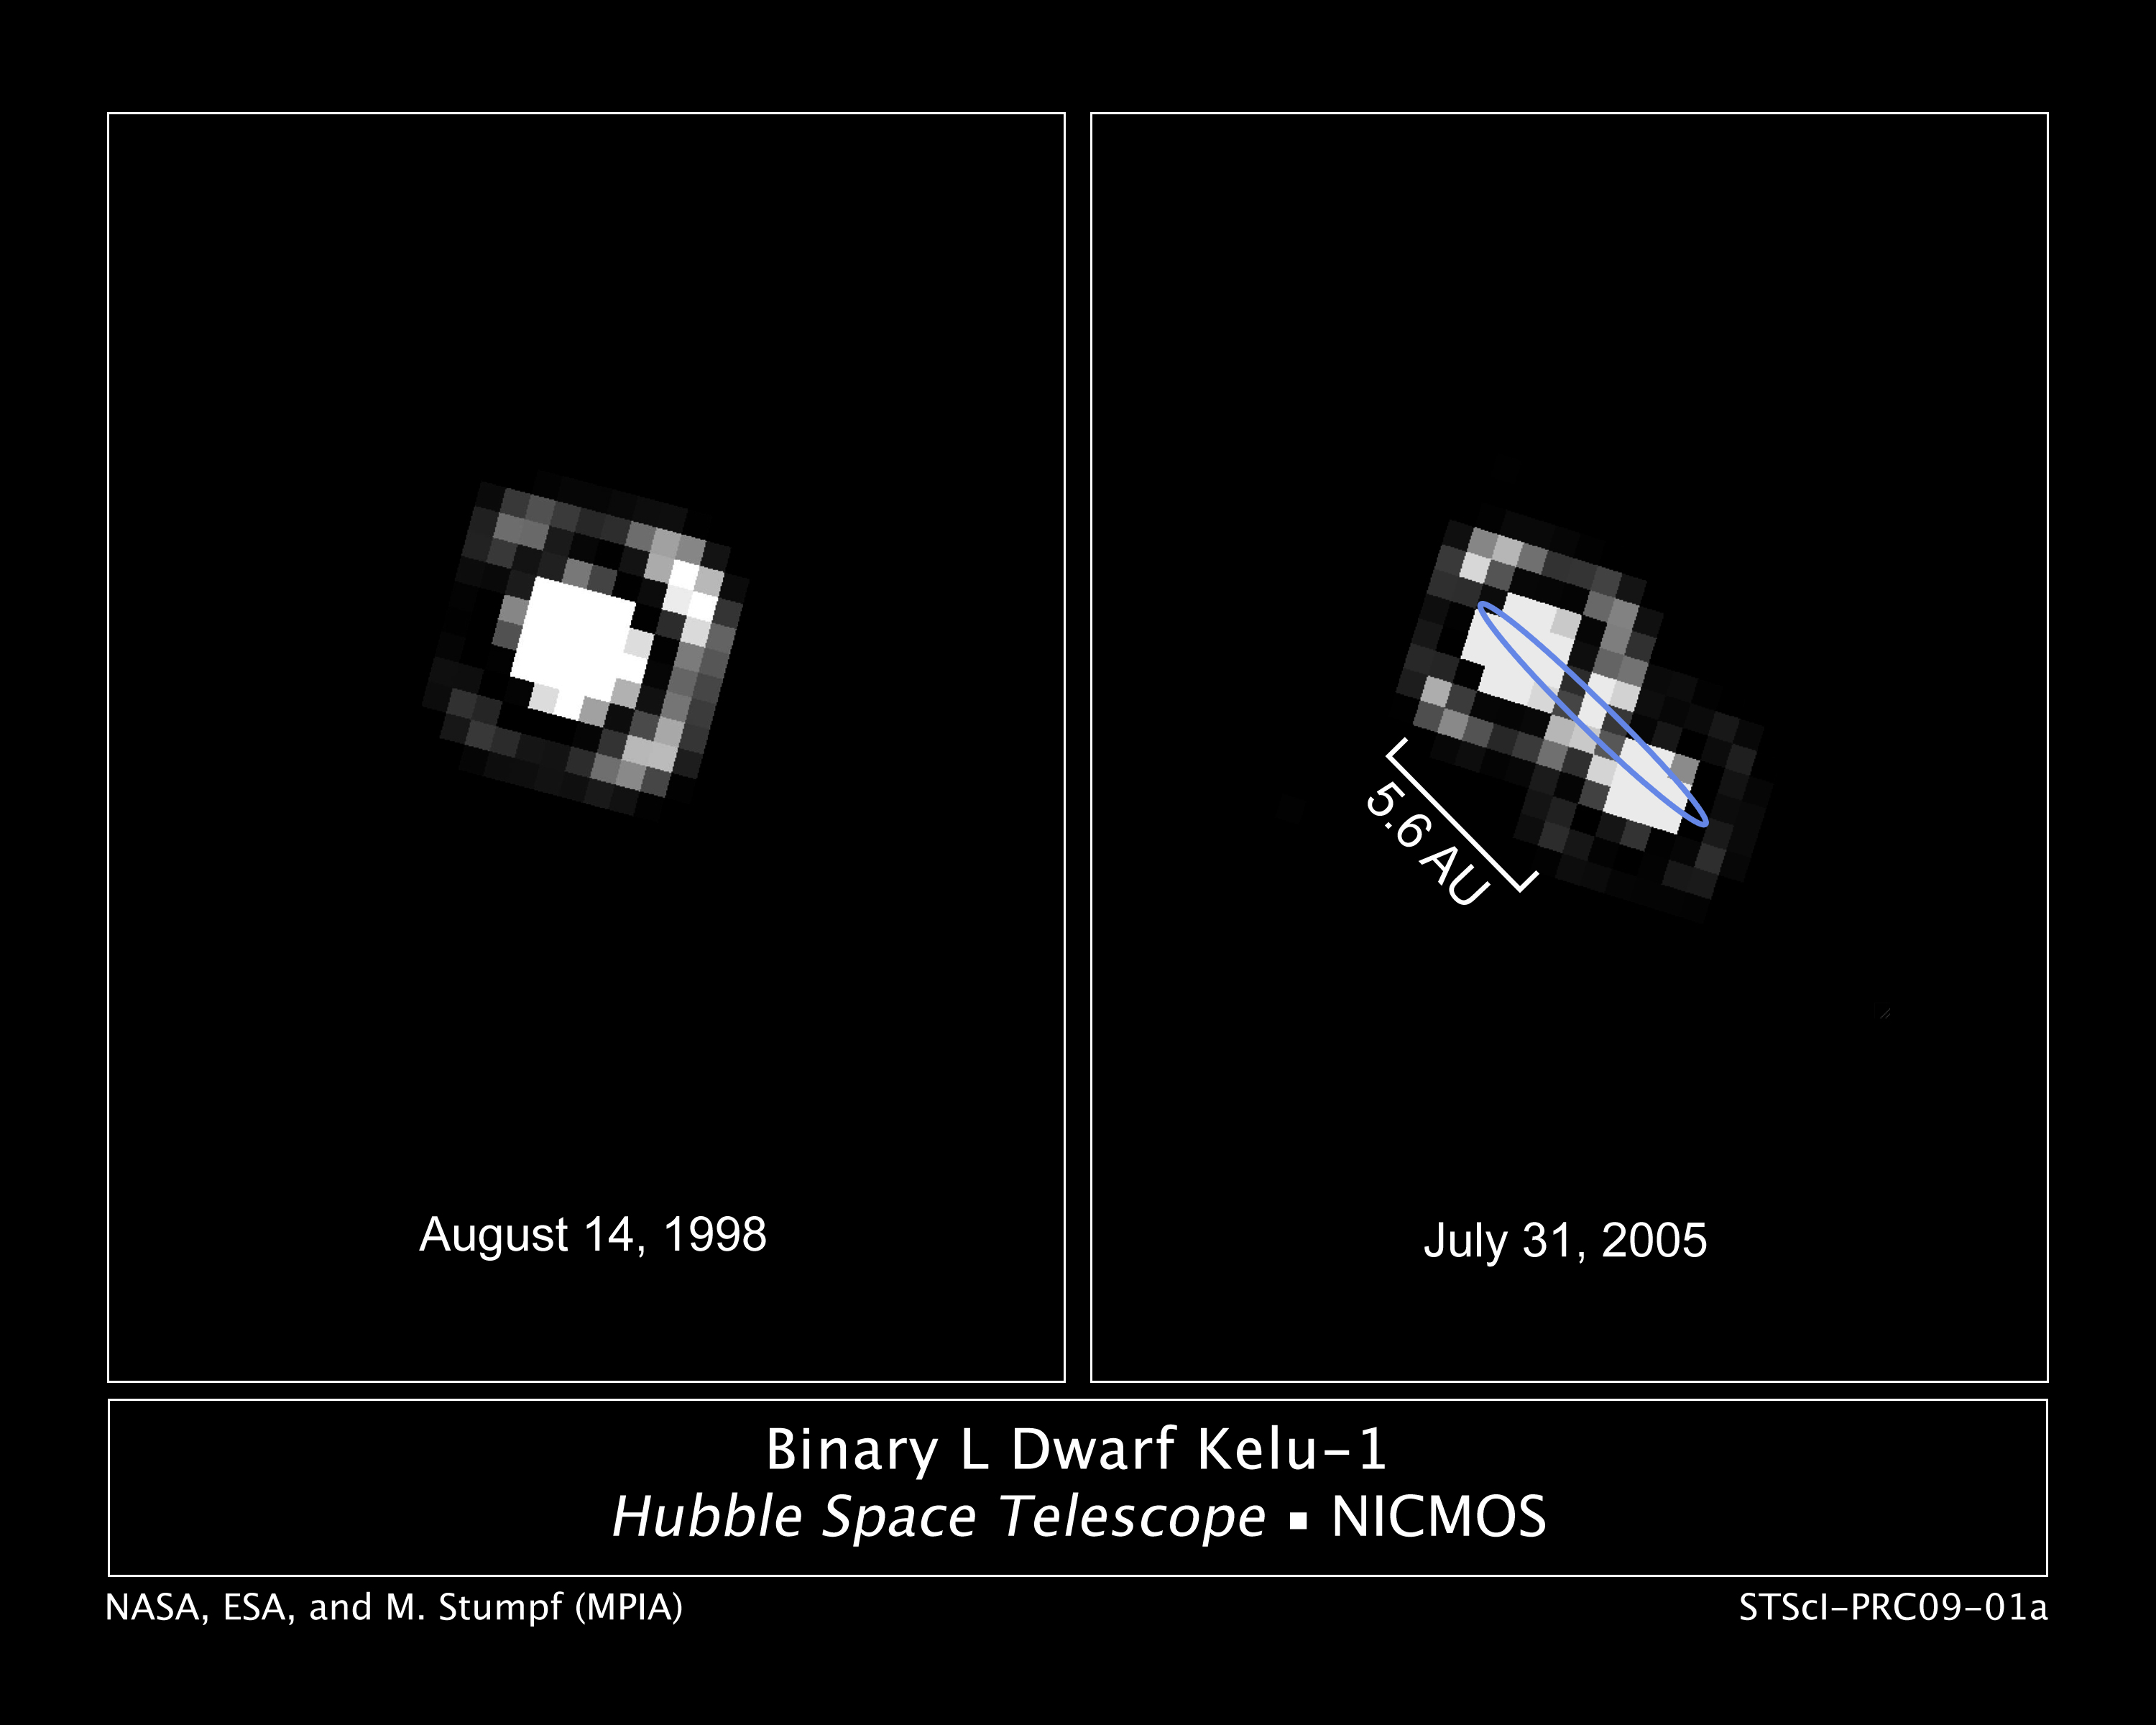

Binary brown dwarf Kelu-1

These NASA/ESA Hubble Space Telescope images of the binary brown dwarf Kelu-1 trace the orbital motion of the two stars over a seven-year span as photographed by the Near Infrared Camera and Multi-Object Spectrometer (NICMOS) on Hubble.

In 1998, the "stars" were too close together to be resolved by Hubble. By 2005, they had moved apart to a separation of 835 million kilometres. The projected maximum separation is 885 million kilometres.

Binary systems allow astronomers to estimate the mass of companion objects. The brown dwarfs are 61 and 50 times the mass of Jupiter. They are therefore too small to burn as stars, but too large to have formed as planets. Based on the total estimated mass of the system, astronomers suspect there is a third brown dwarf member that has not yet been resolved.

Credit: NASA, ESA and M. Stumpf (Max-Planck-Institute for Astronomy)